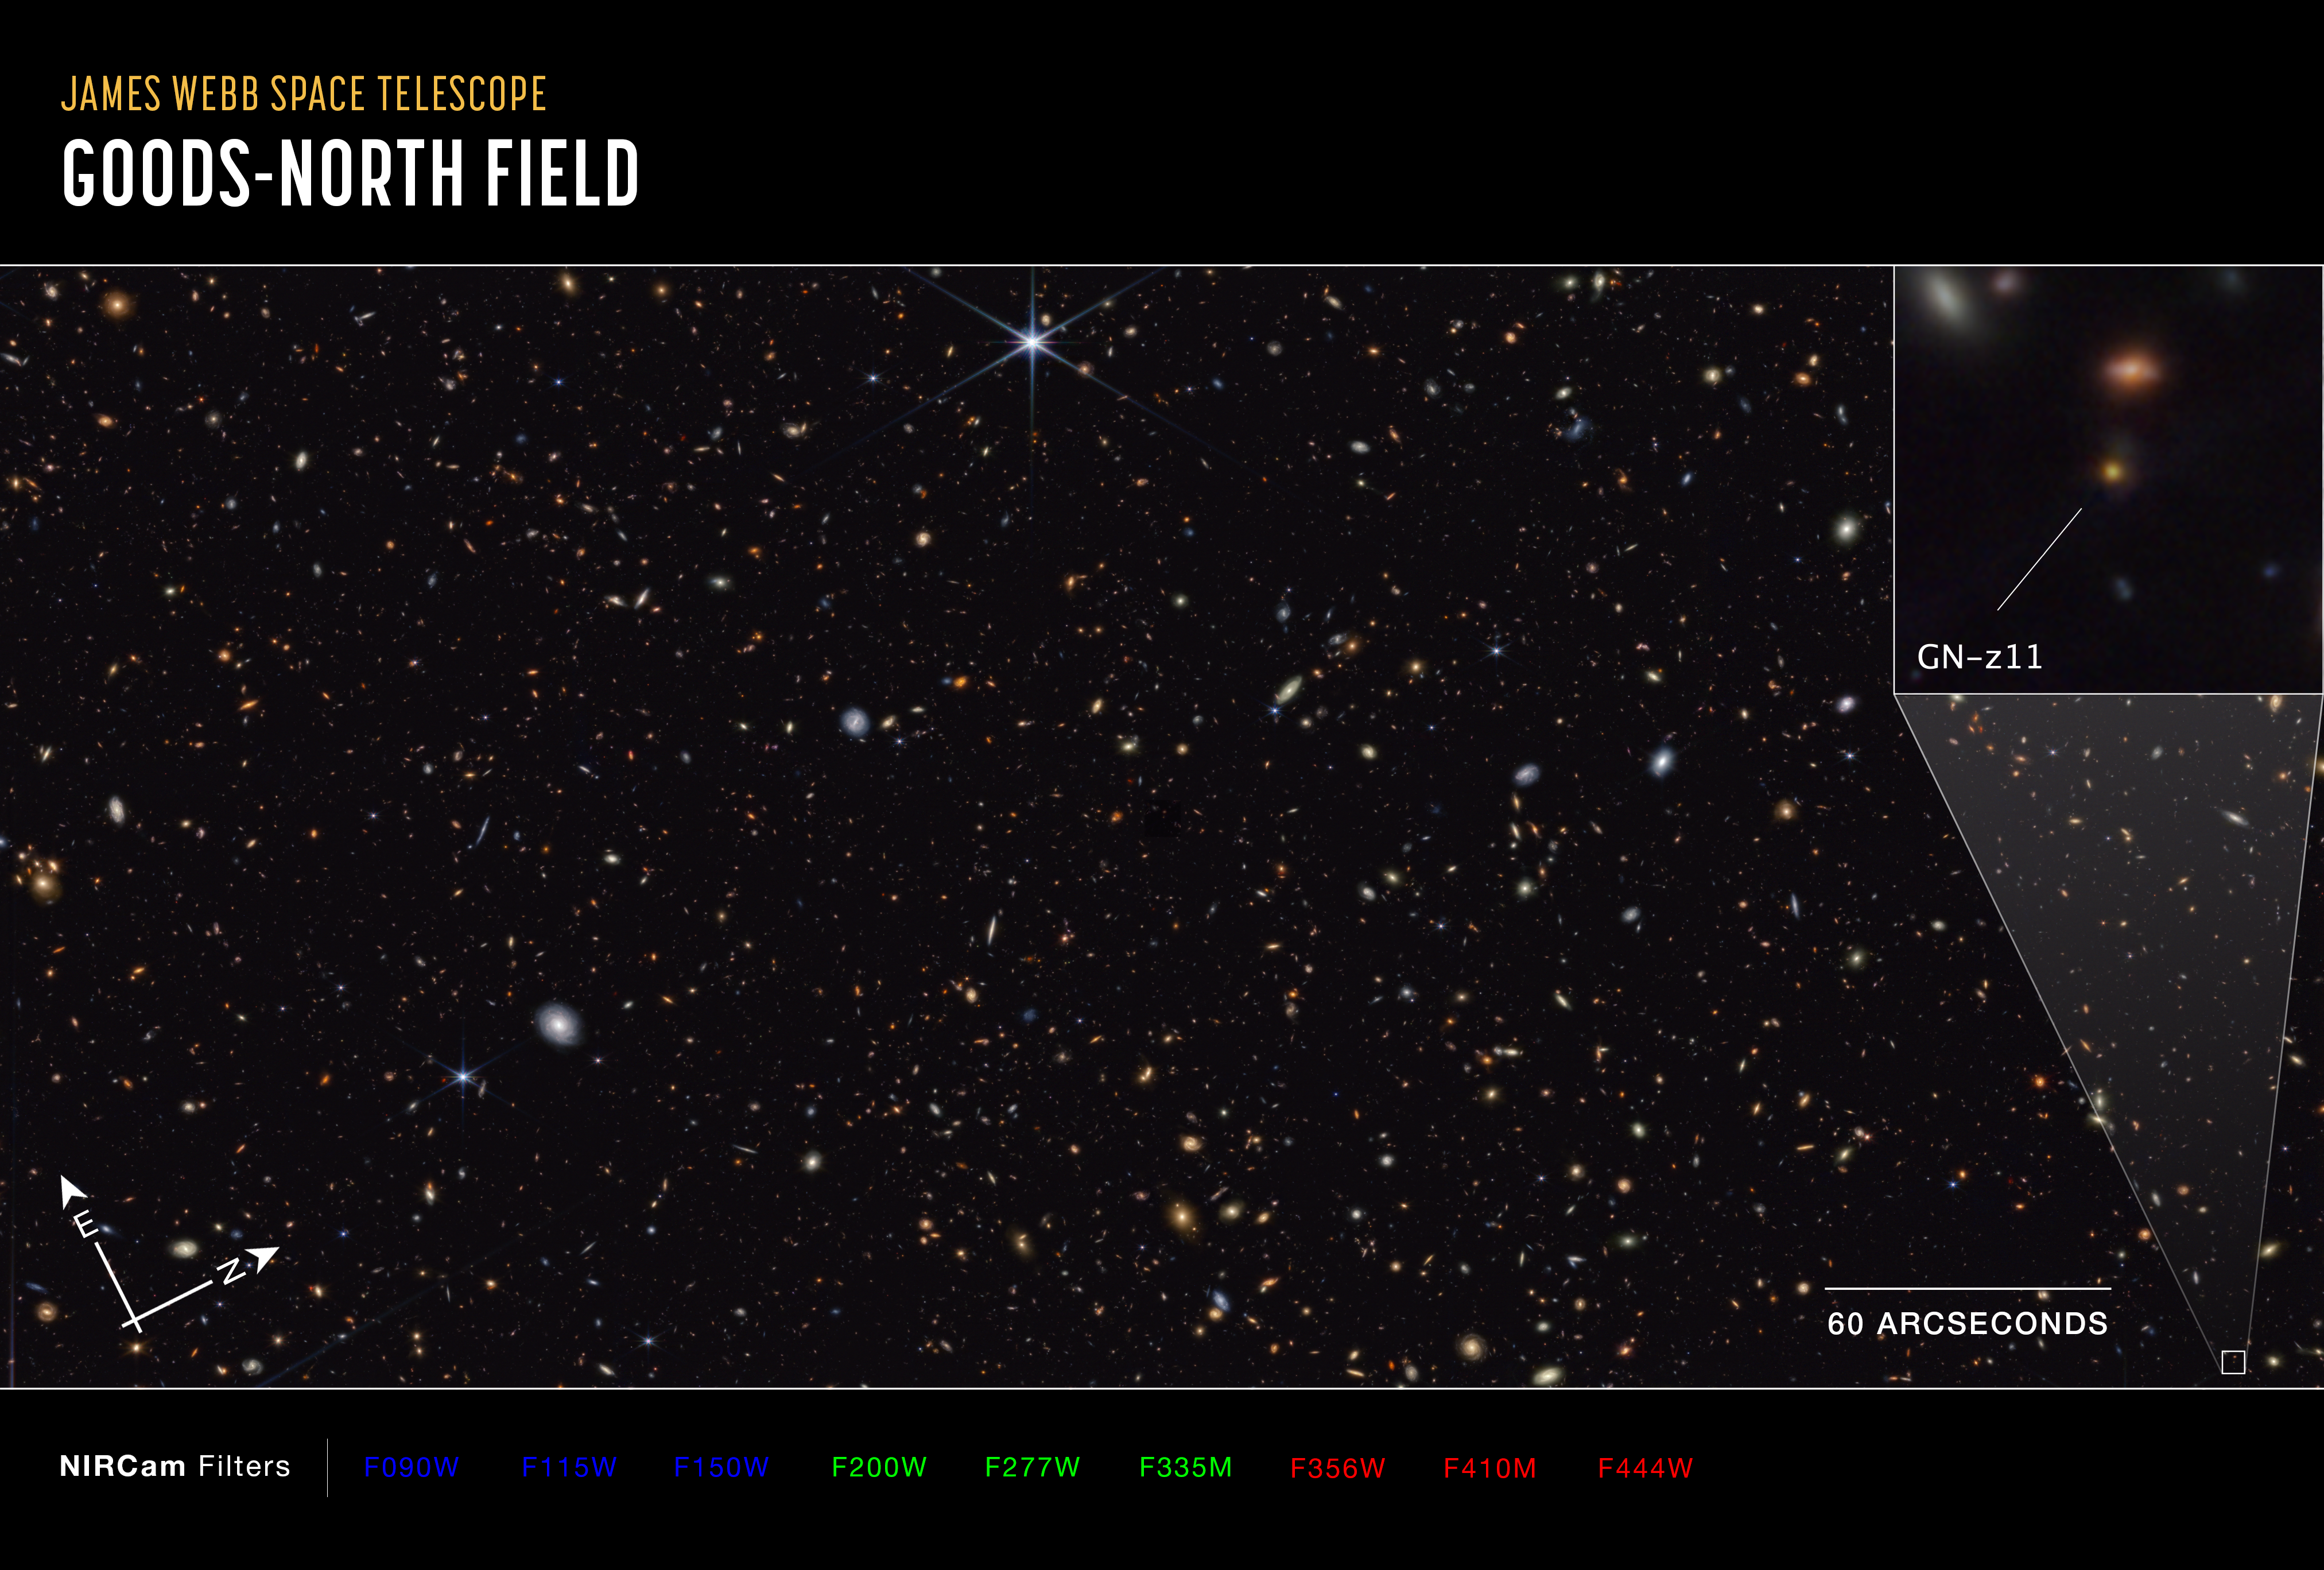

GN-z11 in the GOODS-North field (compass image)

This image of the GOODS-North field, captured by Webb’s Near-Infrared Camera (NIRCam), shows compass arrows, a scale bar, and a colour key for reference.

The north and east compass arrows show the orientation of the image on the sky. Note that the relationship between north and east on the sky (as seen from below) is flipped relative to direction arrows on a map of the ground (as seen from above).

The scale bar is labelled in angular distance on the sky, where one arcsecond is one 3600th of a degree. The scale bar is 60 arcseconds long.

This image shows invisible near-infrared wavelengths of light that have been translated into visible-light colours. The colour key shows which NIRCam filters were used when collecting the light. The colour of each filter name is the visible light colour used to represent the infrared light that passes through that filter.

Credit: NASA, ESA, CSA, B. Robertson (UC Santa Cruz), B. Johnson (CfA), S. Tacchella (Cambridge), M. Rieke (University of Arizona), D. Eisenstein (CfA)